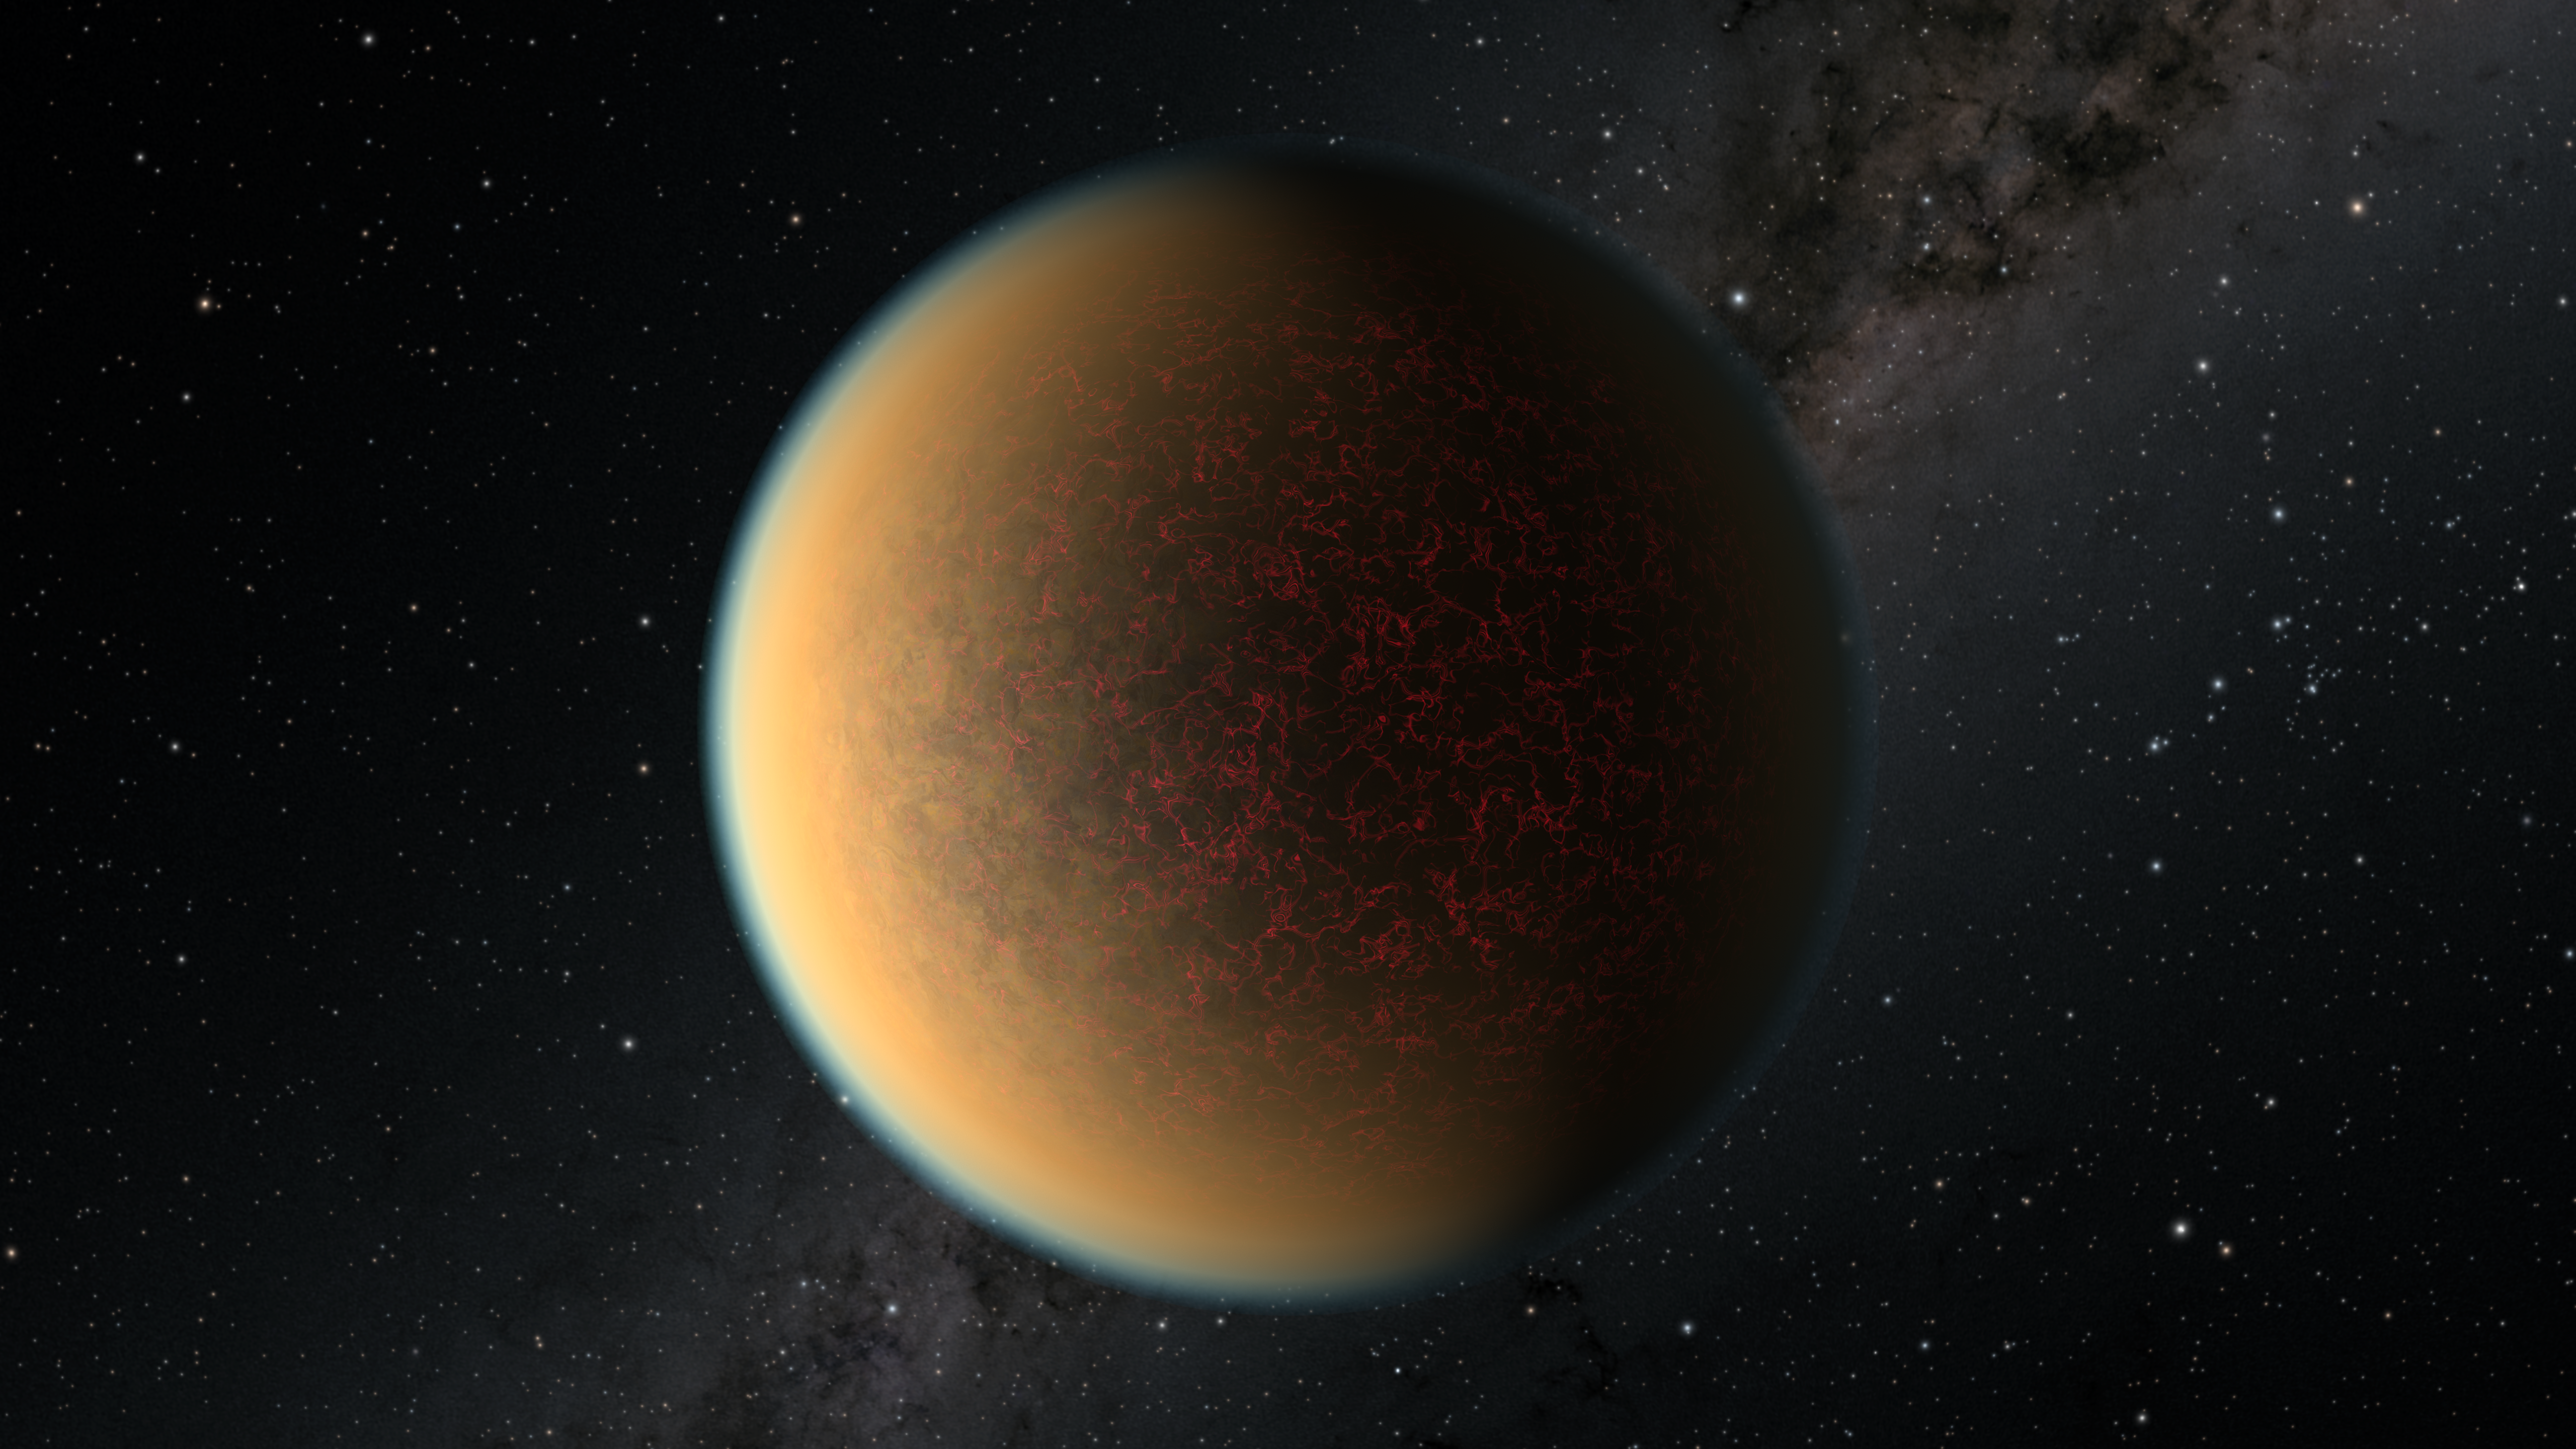

Artist’s Impression of GJ 1132 b

This image is an artist’s impression of the exoplanet GJ 1132 b.

For the first time, scientists using the NASA/ESA Hubble Space Telescope have found evidence of volcanic activity reforming the atmosphere on this rocky planet, which has a similar density, size, and age to that of Earth.

To the surprise of astronomers, new observations from Hubble have uncovered a second atmosphere that has replaced the planet’s first atmosphere. It is rich in hydrogen, hydrogen cyanide, methane and ammonia, and also has a hydrocarbon haze. Astronomers theorise that hydrogen from the original atmosphere was absorbed into the planet’s molten magma mantle and is now being slowly released by volcanism to form a new atmosphere. This second atmosphere, which continues to leak away into space, is continually being replenished from the reservoir of hydrogen in the mantle’s magma.

Credit: NASA, ESA, and R. Hurt (IPAC/Caltech)